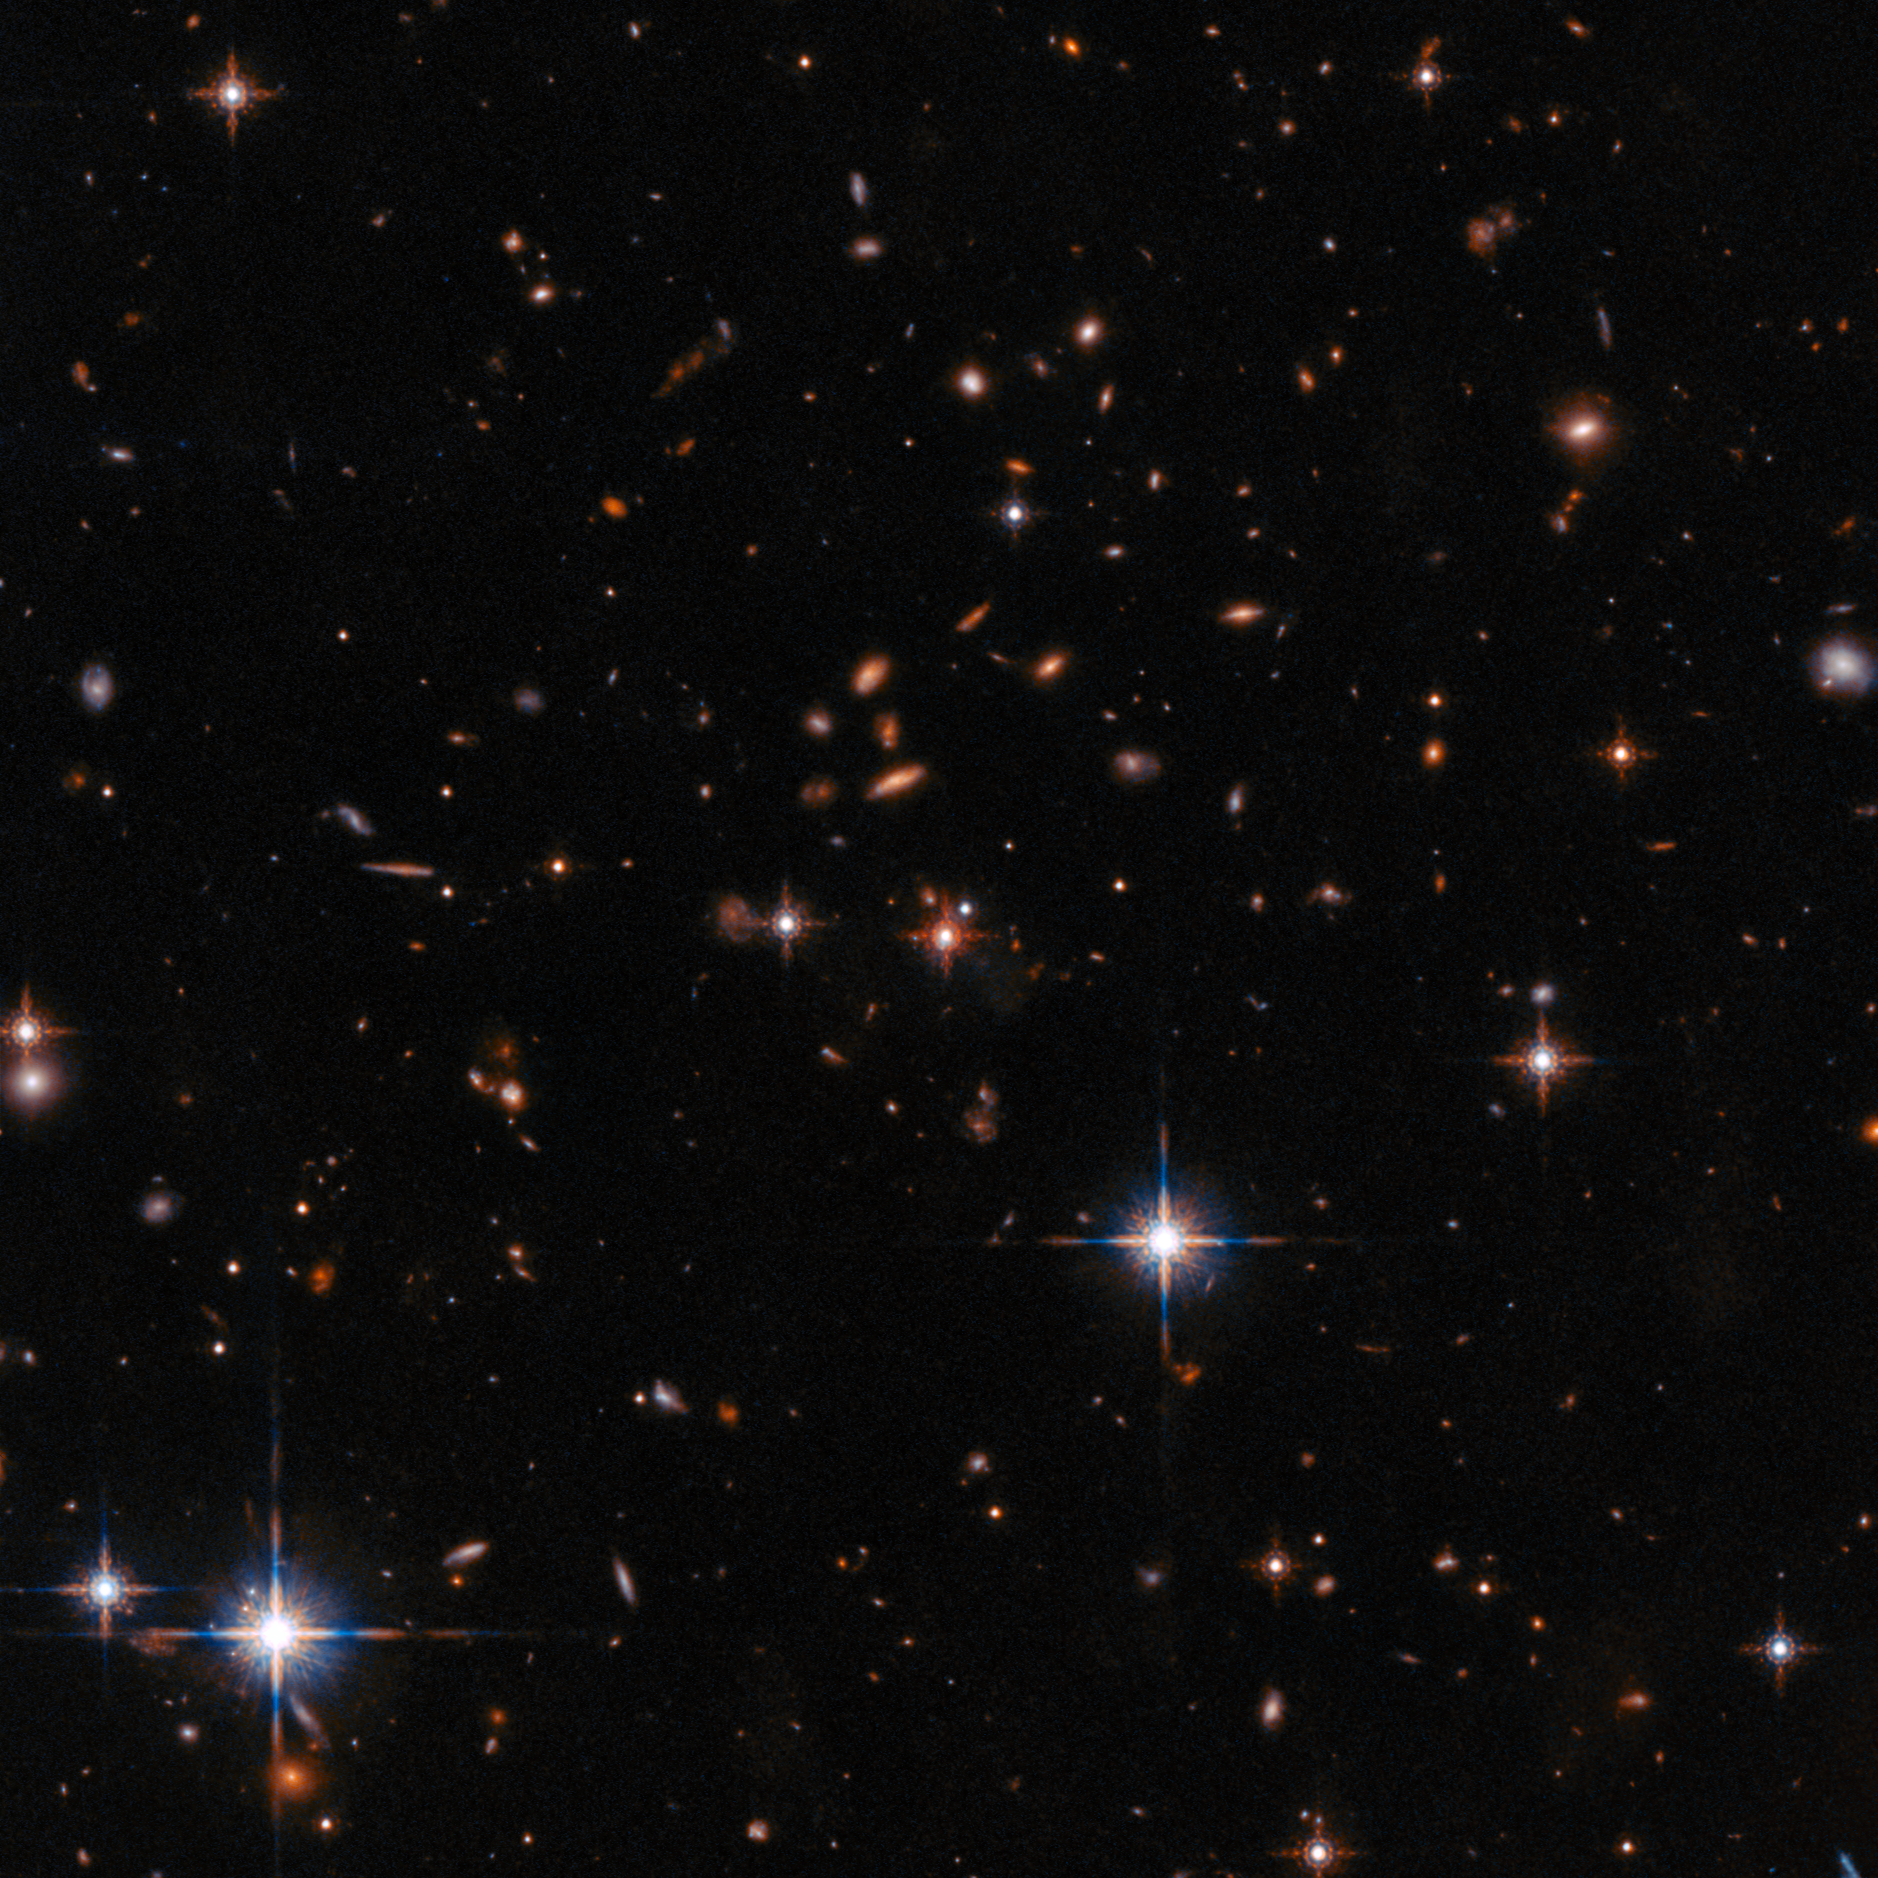

Wide Field Hubble View of Extremely Red Quasar SDSS J165202.64+172852.3

This field of view from the NASA/ESA Hubble Space Telescope is centred on the quasar SDSS J165202.64+172852.3. The quasar is an “extremely red” quasar that exists in the very early Universe, 11.5 billion years ago.

Credit: ESA/Hubble, NASA, N. Zakamska